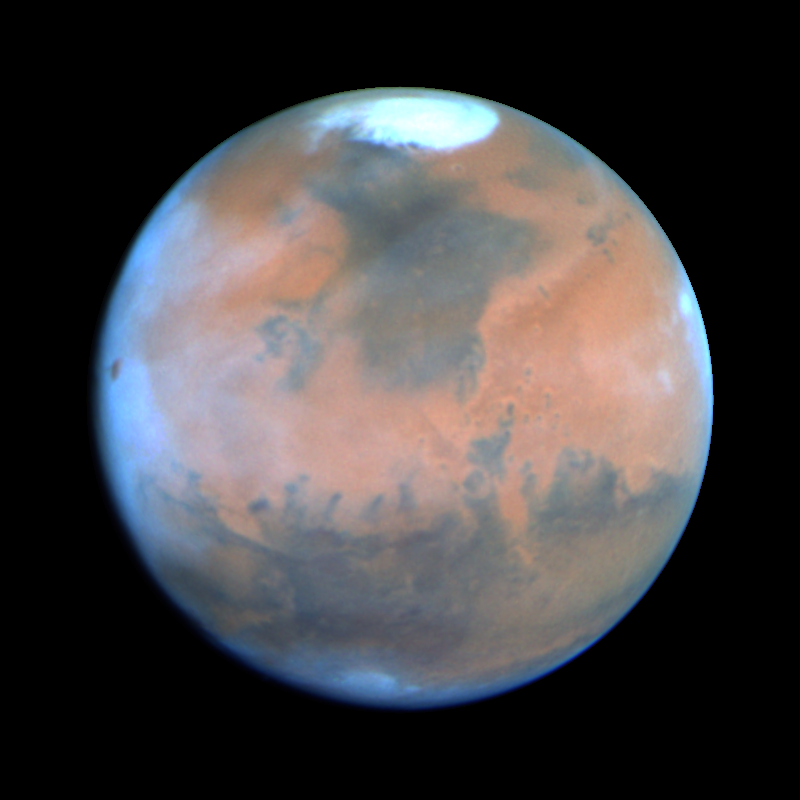

Mars at Opposition 1995 (sol)

This Hubble Space Telescope view of the planet Mars is the clearest picture ever taken from Earth, surpassed only by close-up shots sent back by visiting space probes. The picture was taken on February 25, 1995, when Mars was at a distance of approximately 65 million miles (103 million km) from Earth.

Credit: Philip James (University of Toledo), Steven Lee (University of Colorado), NASA/ESA